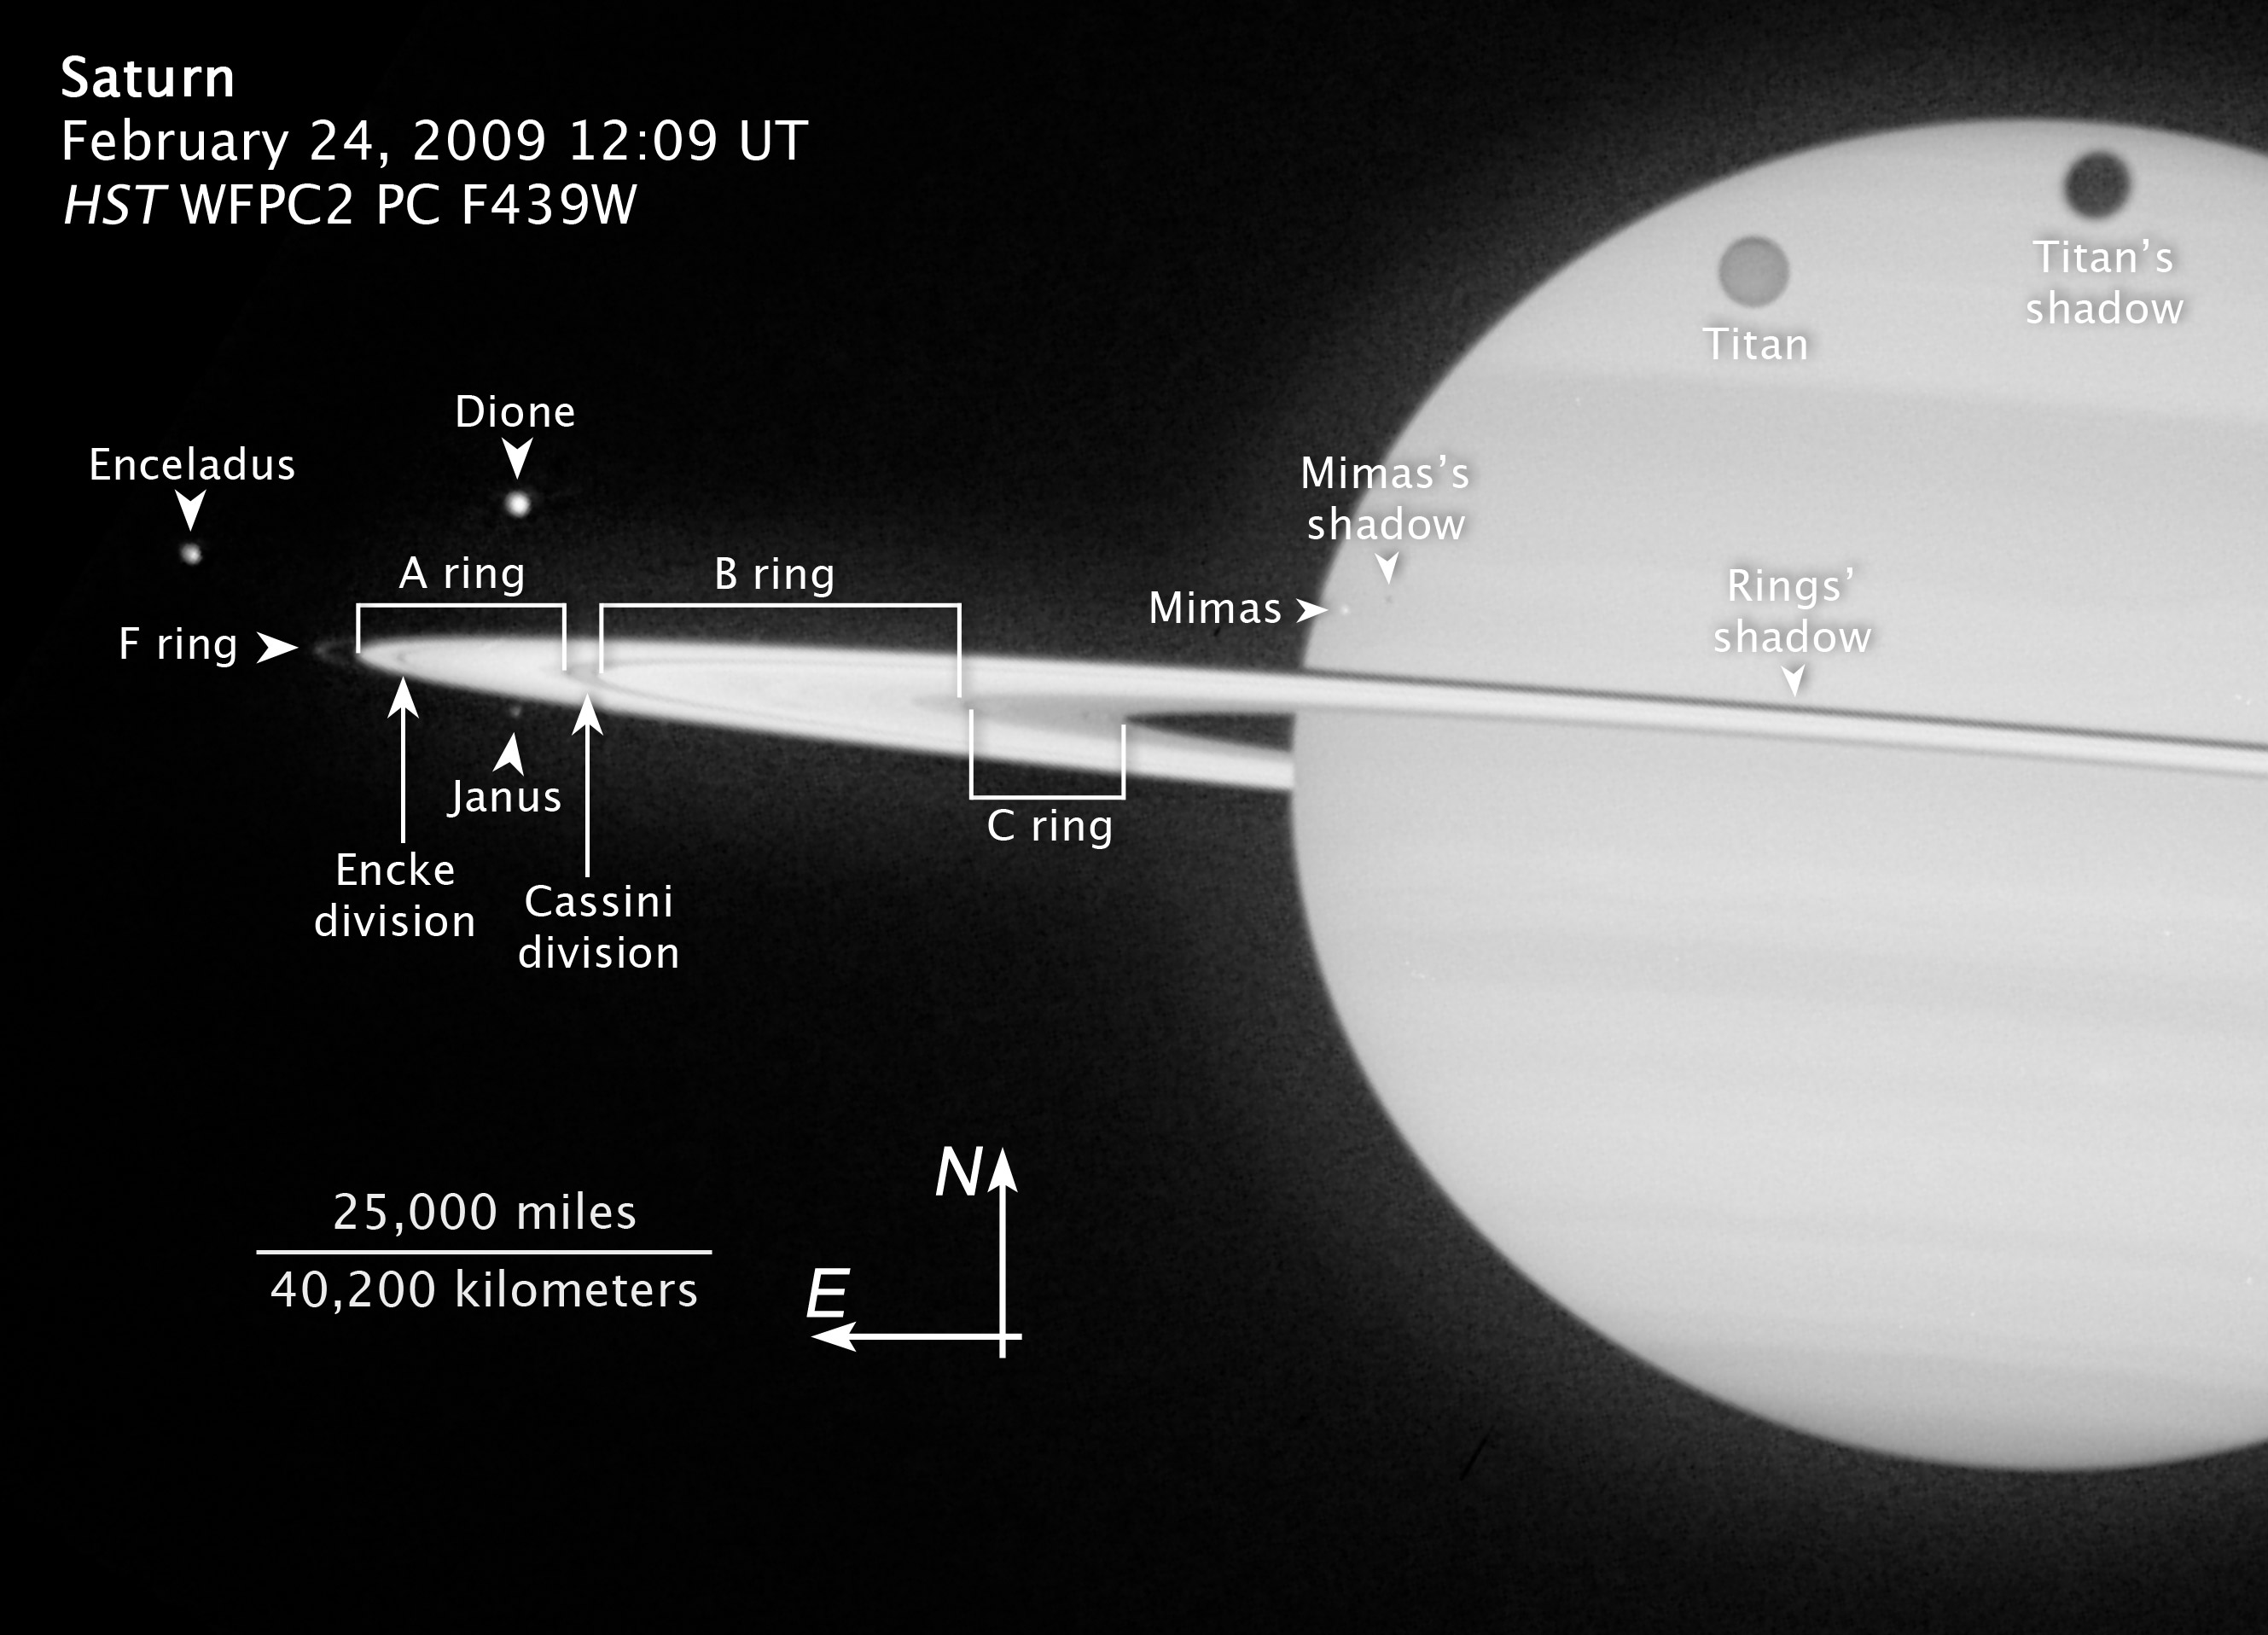

Annotated image of Saturn's rings and moons

This Hubble Space Telescope image taken on 24 February 2009, highlights five of Saturn's moons and their shadows as they pass by their parent planet. Also visible are several of the planet's rings and two of the largest gaps: the Cassini Division and the Encke Division.

Credit: NASA, ESA and Z. Levay (STScI). Photo credit: NASA, ESA and the Hubble Heritage Team (STScI/AURA). Acknowledgment: M. Wong (STScI/UC Berkeley) and C. Go (Philippines)